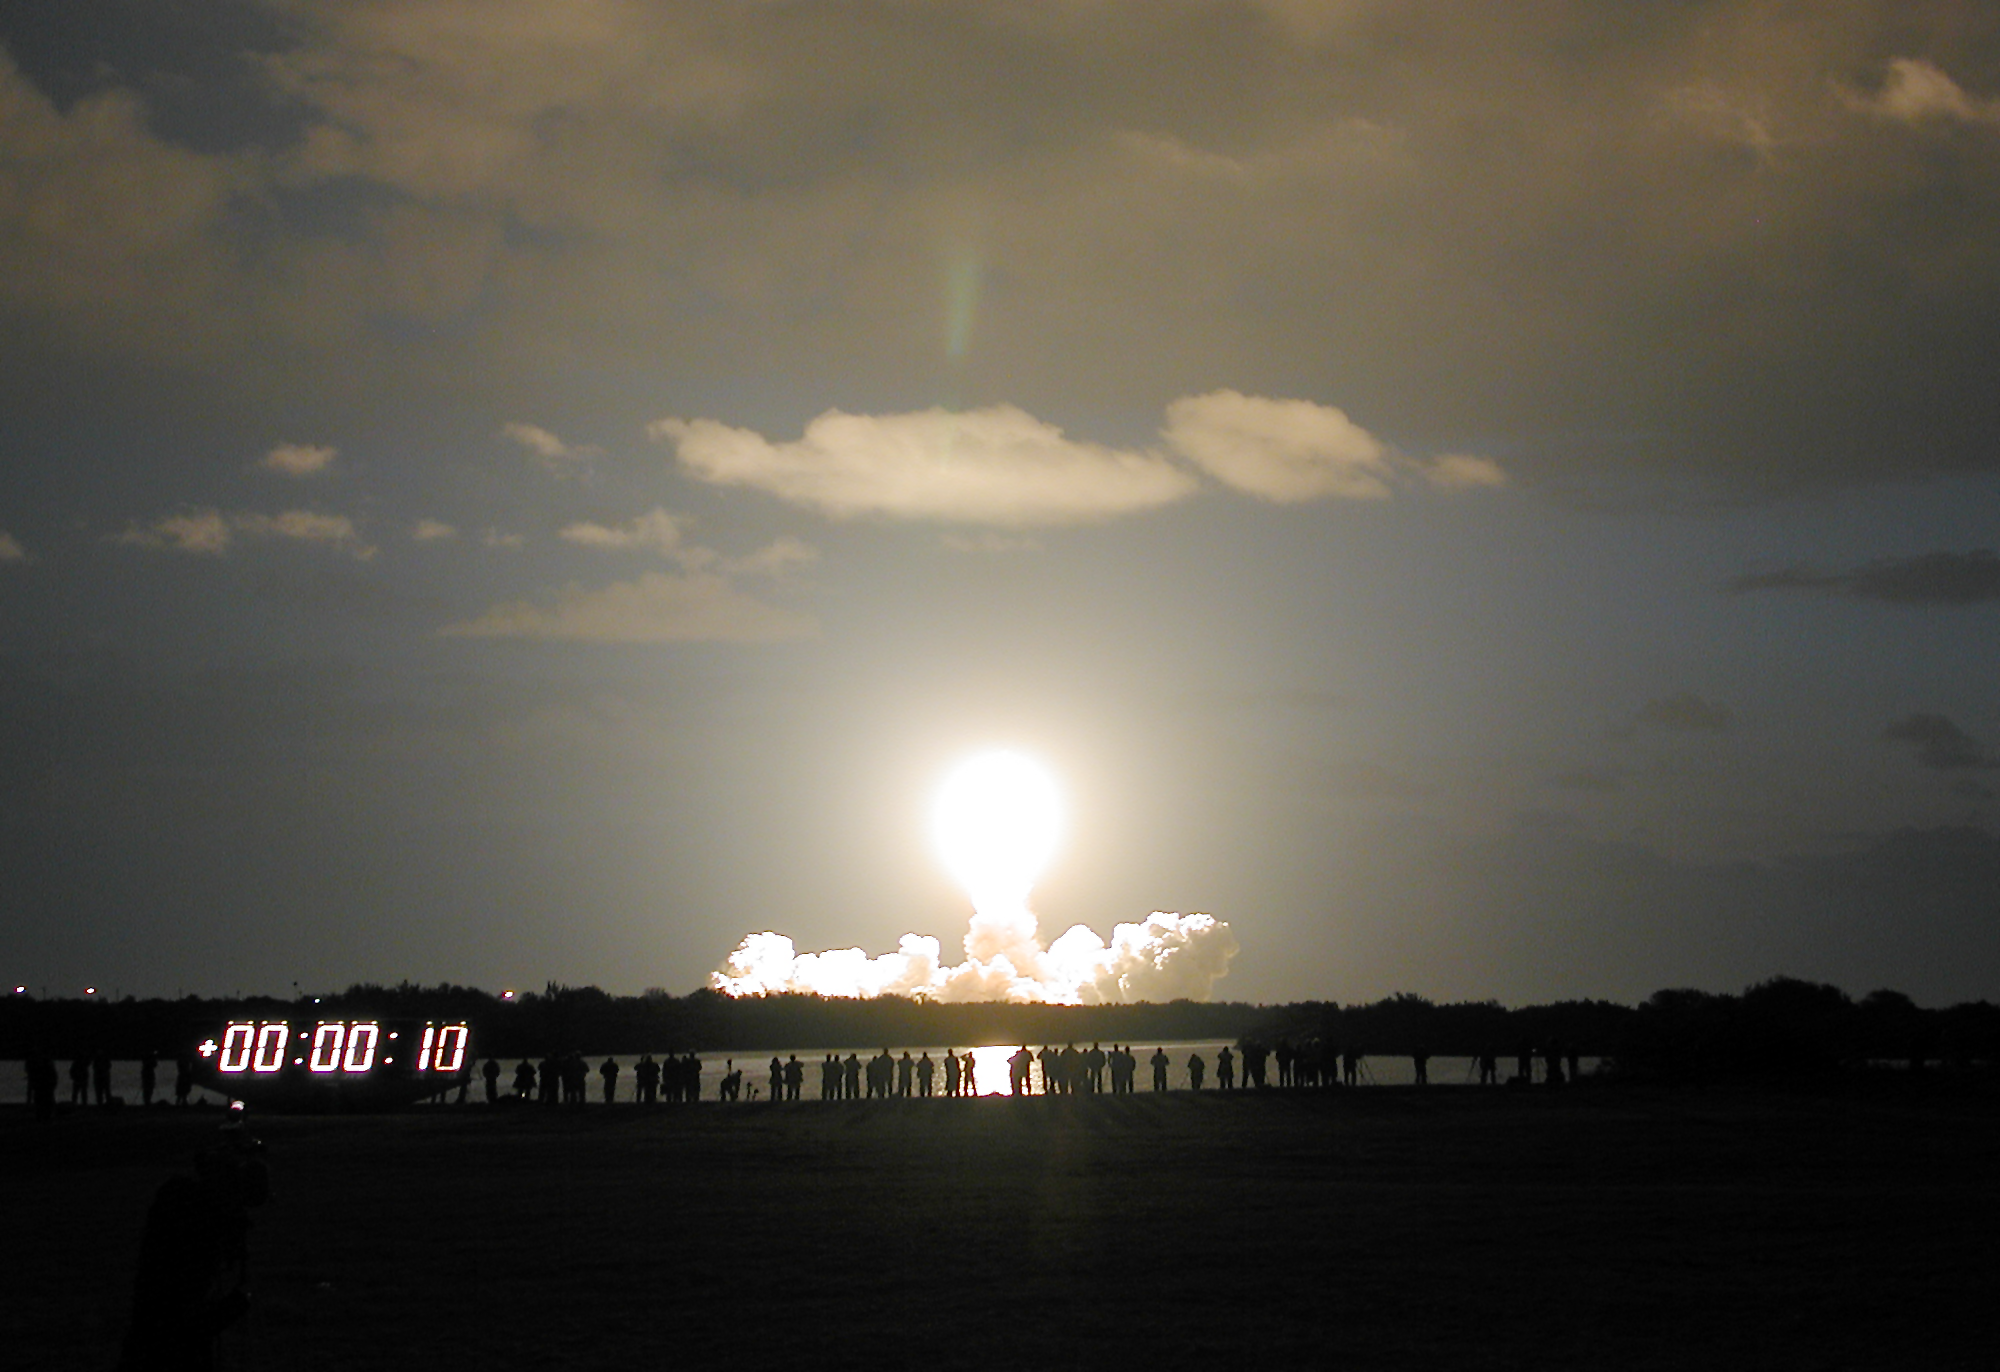

SM3B - Colombia heads into the early morning sky on its way to the Hubble Space Telescope

Colombia heads into the early morning sky on its way to the Hubble Space Telescope for Servicing Mission 3B. (Launch at 11:22 UT 1 March 2002).

Credit: ESA 2002. Photo by Lars Lindberg Christensen